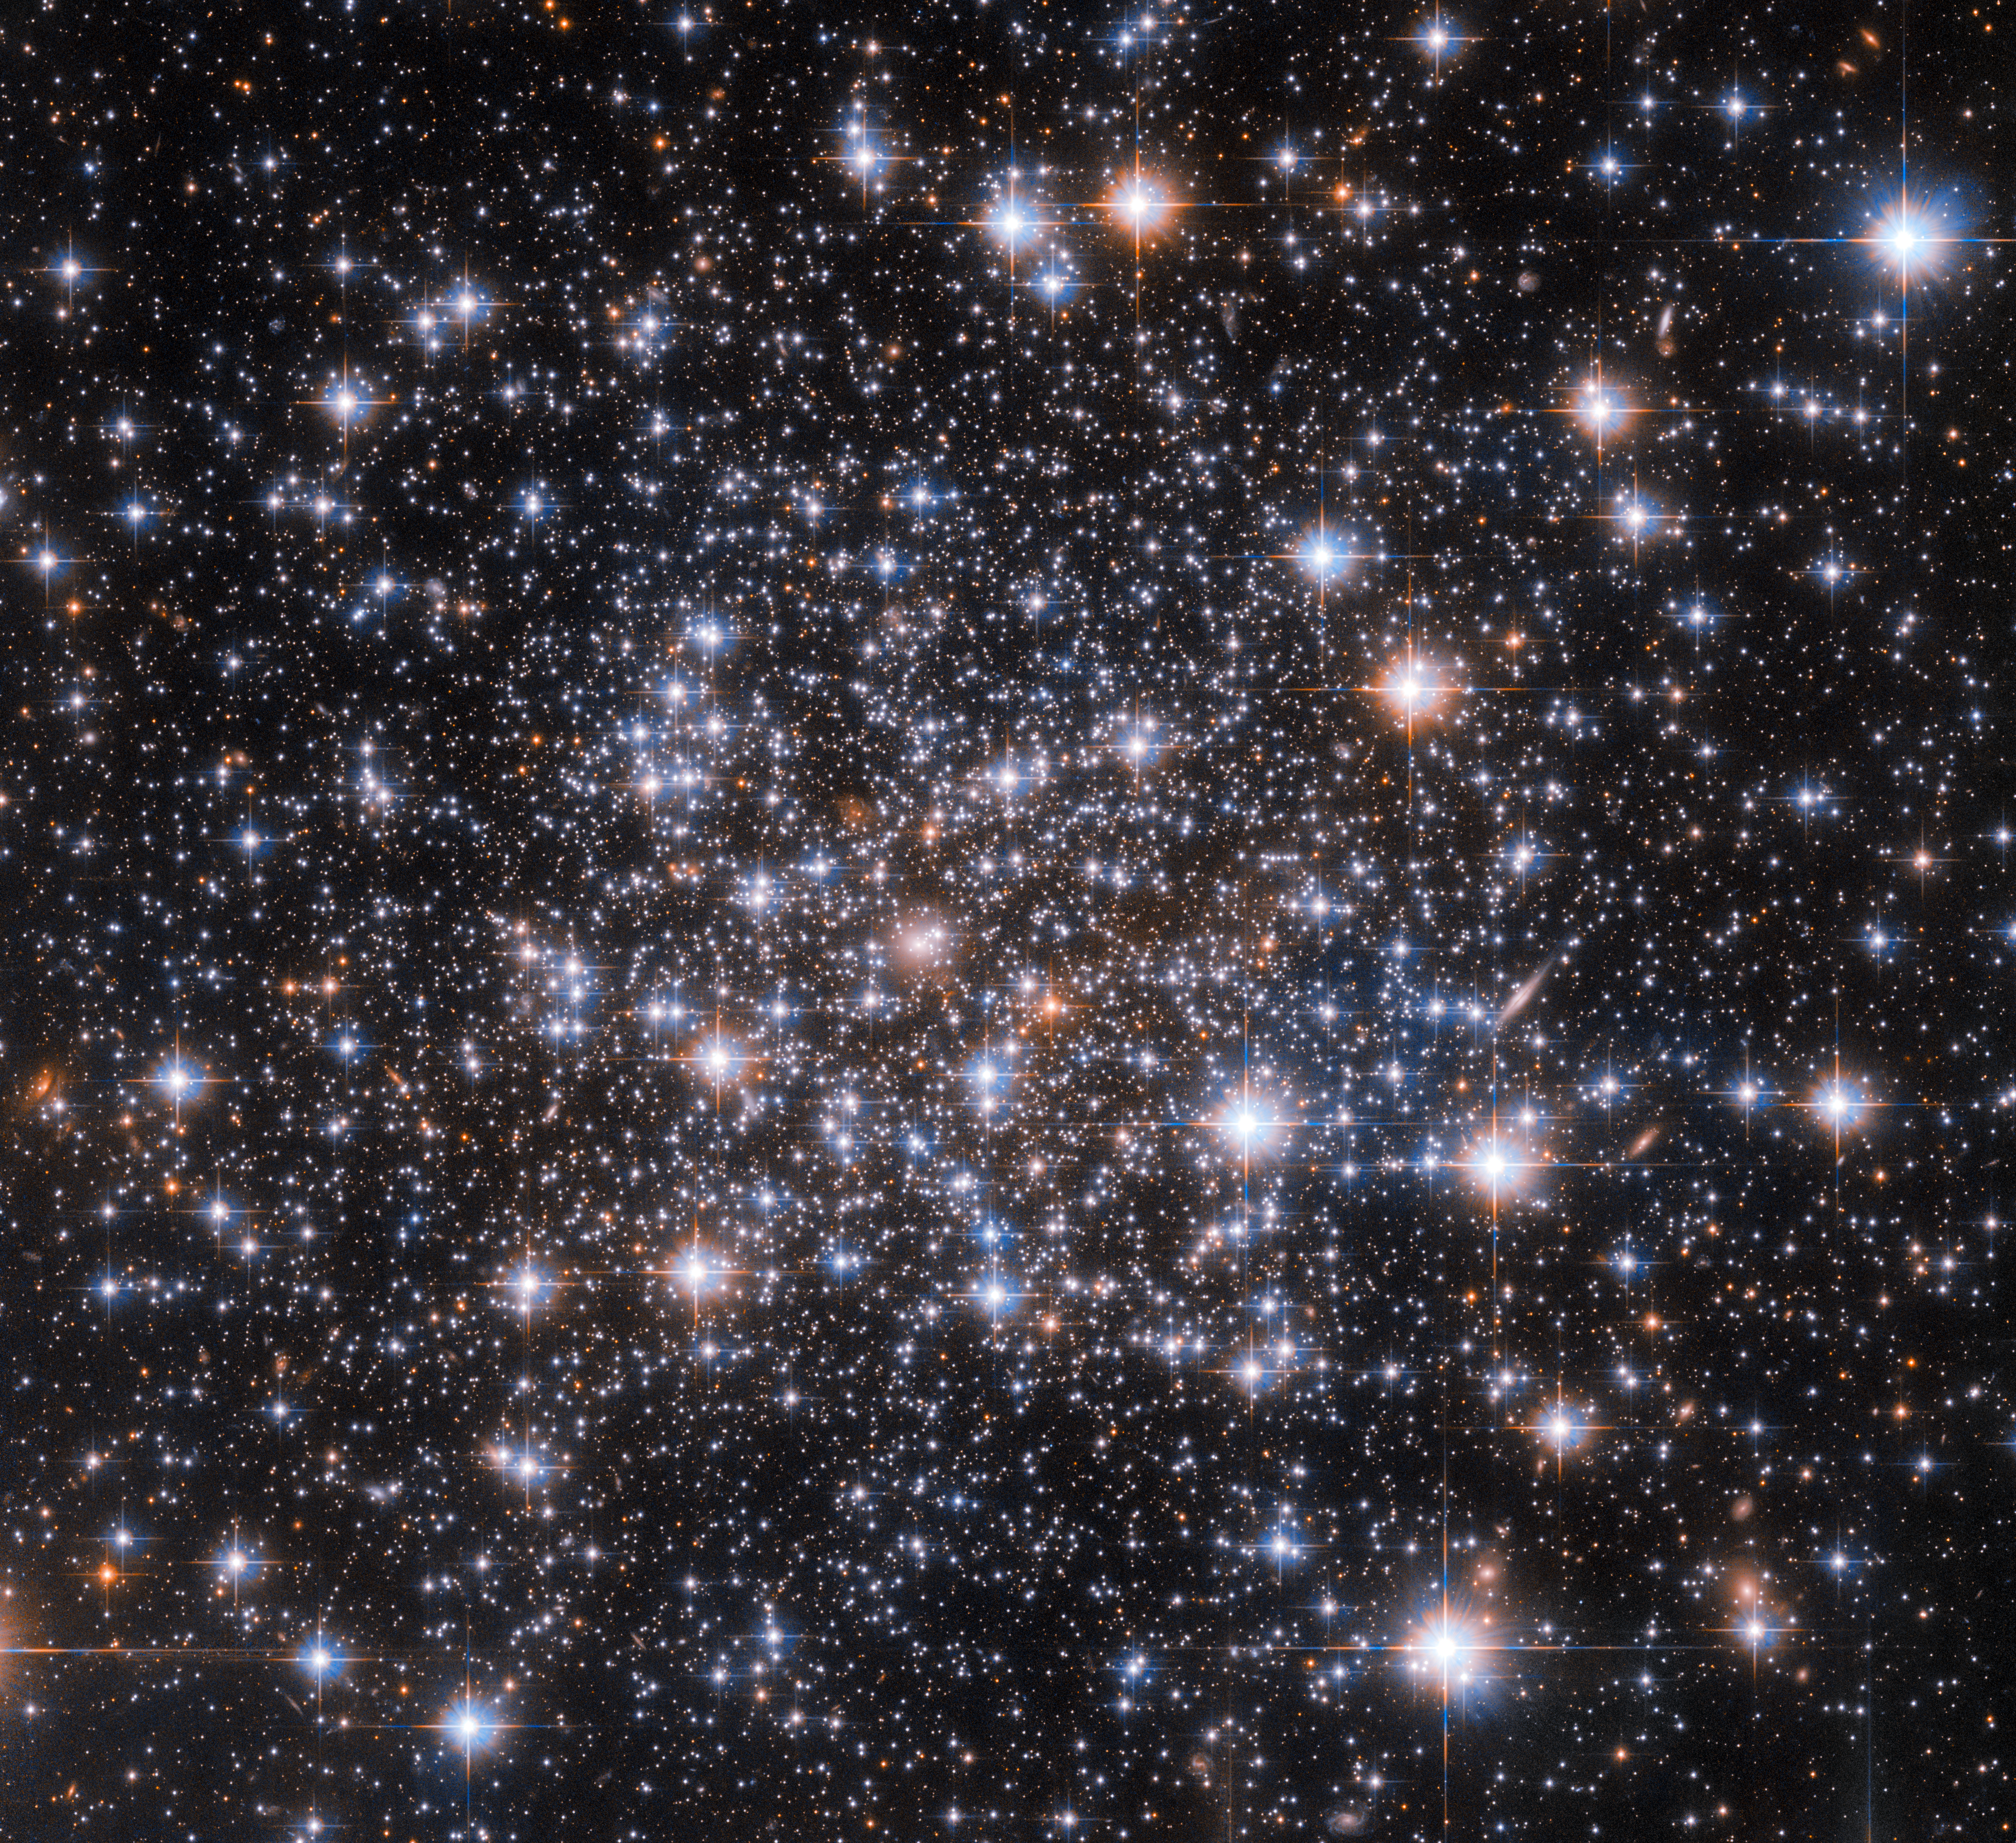

Hubble Investigates an Enigmatic Globular Cluster

Like Sherlock Holmes’s magnifying glass writ large, the NASA/ESA Hubble Space Telescope has been used to peer into an astronomical mystery in search of clues. The enigma in question concerns the globular cluster Ruprecht 106, which is pictured in this image. While the constituent stars of globular clusters all formed at approximately the same location and time, it turns out that almost all globular clusters contain groups of stars with distinct chemical compositions. These distinct chemical fingerprints are left by groups of stars with very slightly different ages or compositions from the rest of the cluster. A tiny handful of globular clusters do not possess these multiple populations of stars, and Ruprecht 106 is a member of this enigmatic group.

Hubble captured this star-studded image using one of its most versatile instruments; the Advanced Camera for Surveys (ACS). Much like the stars in globular clusters, Hubble’s instruments also have distinct generations: ACS is a third generation instrument which replaced the original Faint Object Camera in 2002. Some of Hubble’s other instruments have also gone through three iterations: the Wide Field Camera 3 replaced the Wide Field and Planetary Camera 2 (WFPC2) during the final servicing mission to Hubble. WFPC2 itself replaced the original Wide Field and Planetary Camera, which was installed on Hubble at launch.

Astronauts on the NASA Space Shuttle serviced Hubble in orbit a total of five times, and were able to either upgrade aging equipment or replace instruments with newer, more capable versions. This high-tech tinkering in low Earth orbit has helped keep Hubble at the cutting edge of astronomy for more than 3 decades.

Credit: ESA/Hubble & NASA, A. Dotter